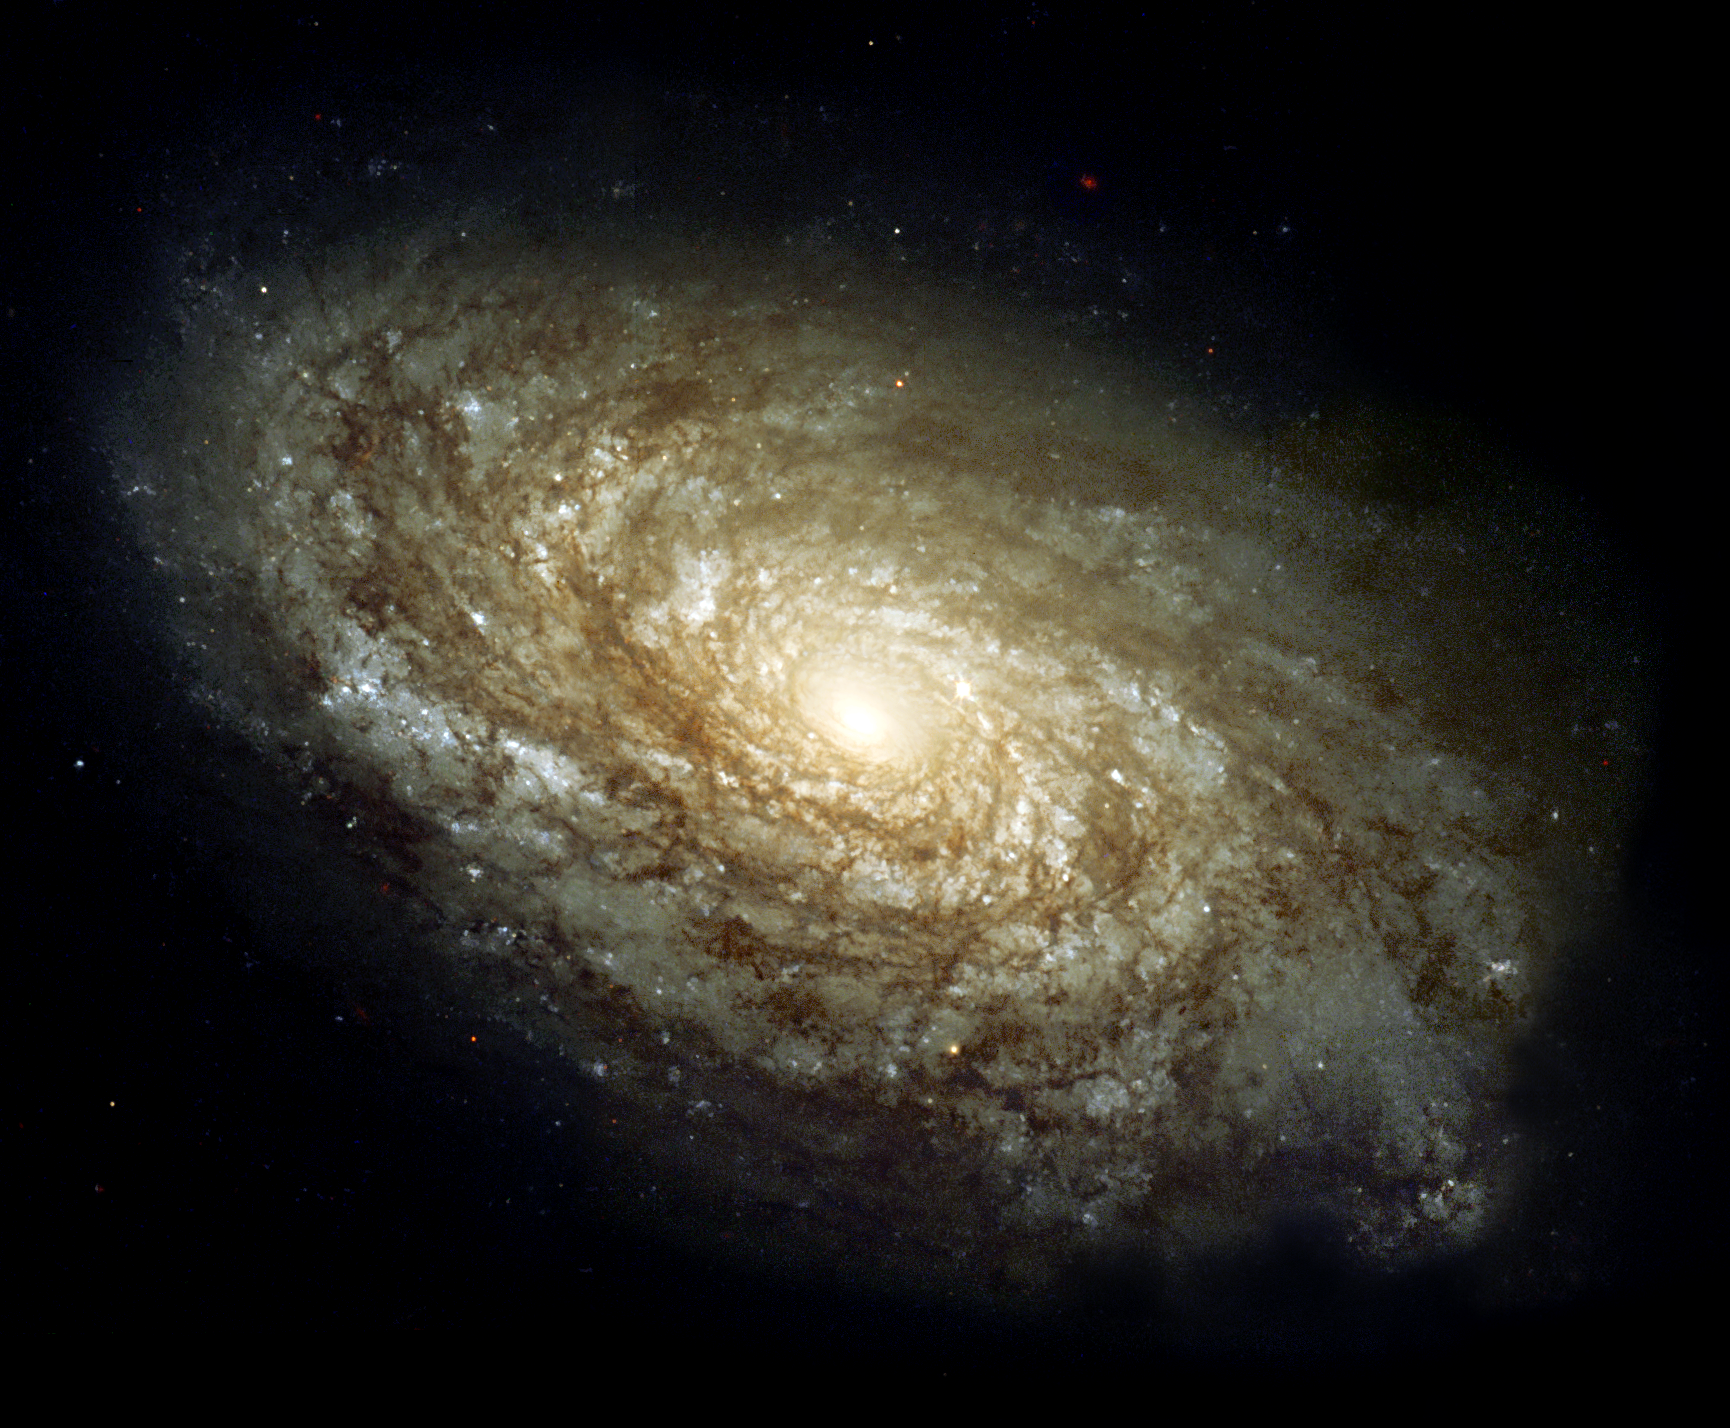

Magnificent details in a dusty spiral galaxy

In 1995, the majestic spiral galaxy NGC 4414 was imaged by the Hubble Space Telescope as part of the HST Key Project on the Extragalactic Distance Scale. An international team of astronomers, led by Dr. Wendy Freedman of the Observatories of the Carnegie Institution of Washington, observed this galaxy on 13 different occasions over the course of two months.

Images were obtained with Hubble's Wide Field Planetary Camera 2 (WFPC2) through three different colour filters. Based on their discovery and careful brightness measurements of variable stars in NGC 4414, the Key Project astronomers were able to make an accurate determination of the distance to the galaxy.

Credit: Hubble Heritage Team (AURA/STScI/NASA/ESA)